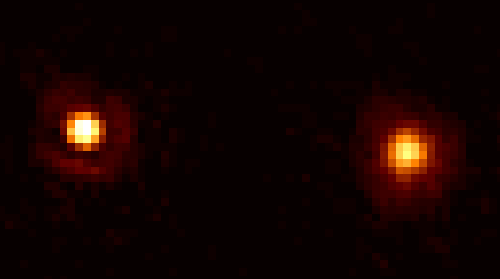

Omicron Ceti

This is a NASA/ESA Hubble Space Telescope image of the cool red giant star Mira A (right), officially called Omicron Ceti in the constellation Cetus, and its nearby hot companion (left) taken on December 11, 1995 in visible light using the European Space Agency's Faint Object Camera (FOC). The stars in this false-color picture are separated by an angular size of only 0.6 arcseconds (equal to 70 times the distance between Earth and the Sun), but clearly resolved by the FOC. Image reconstruction techniques have been used to further enhance the details in the Mira images.

Credit: Margarita Karovska (Harvard-Smithsonian Center for Astrophysics), and NASA/ESA